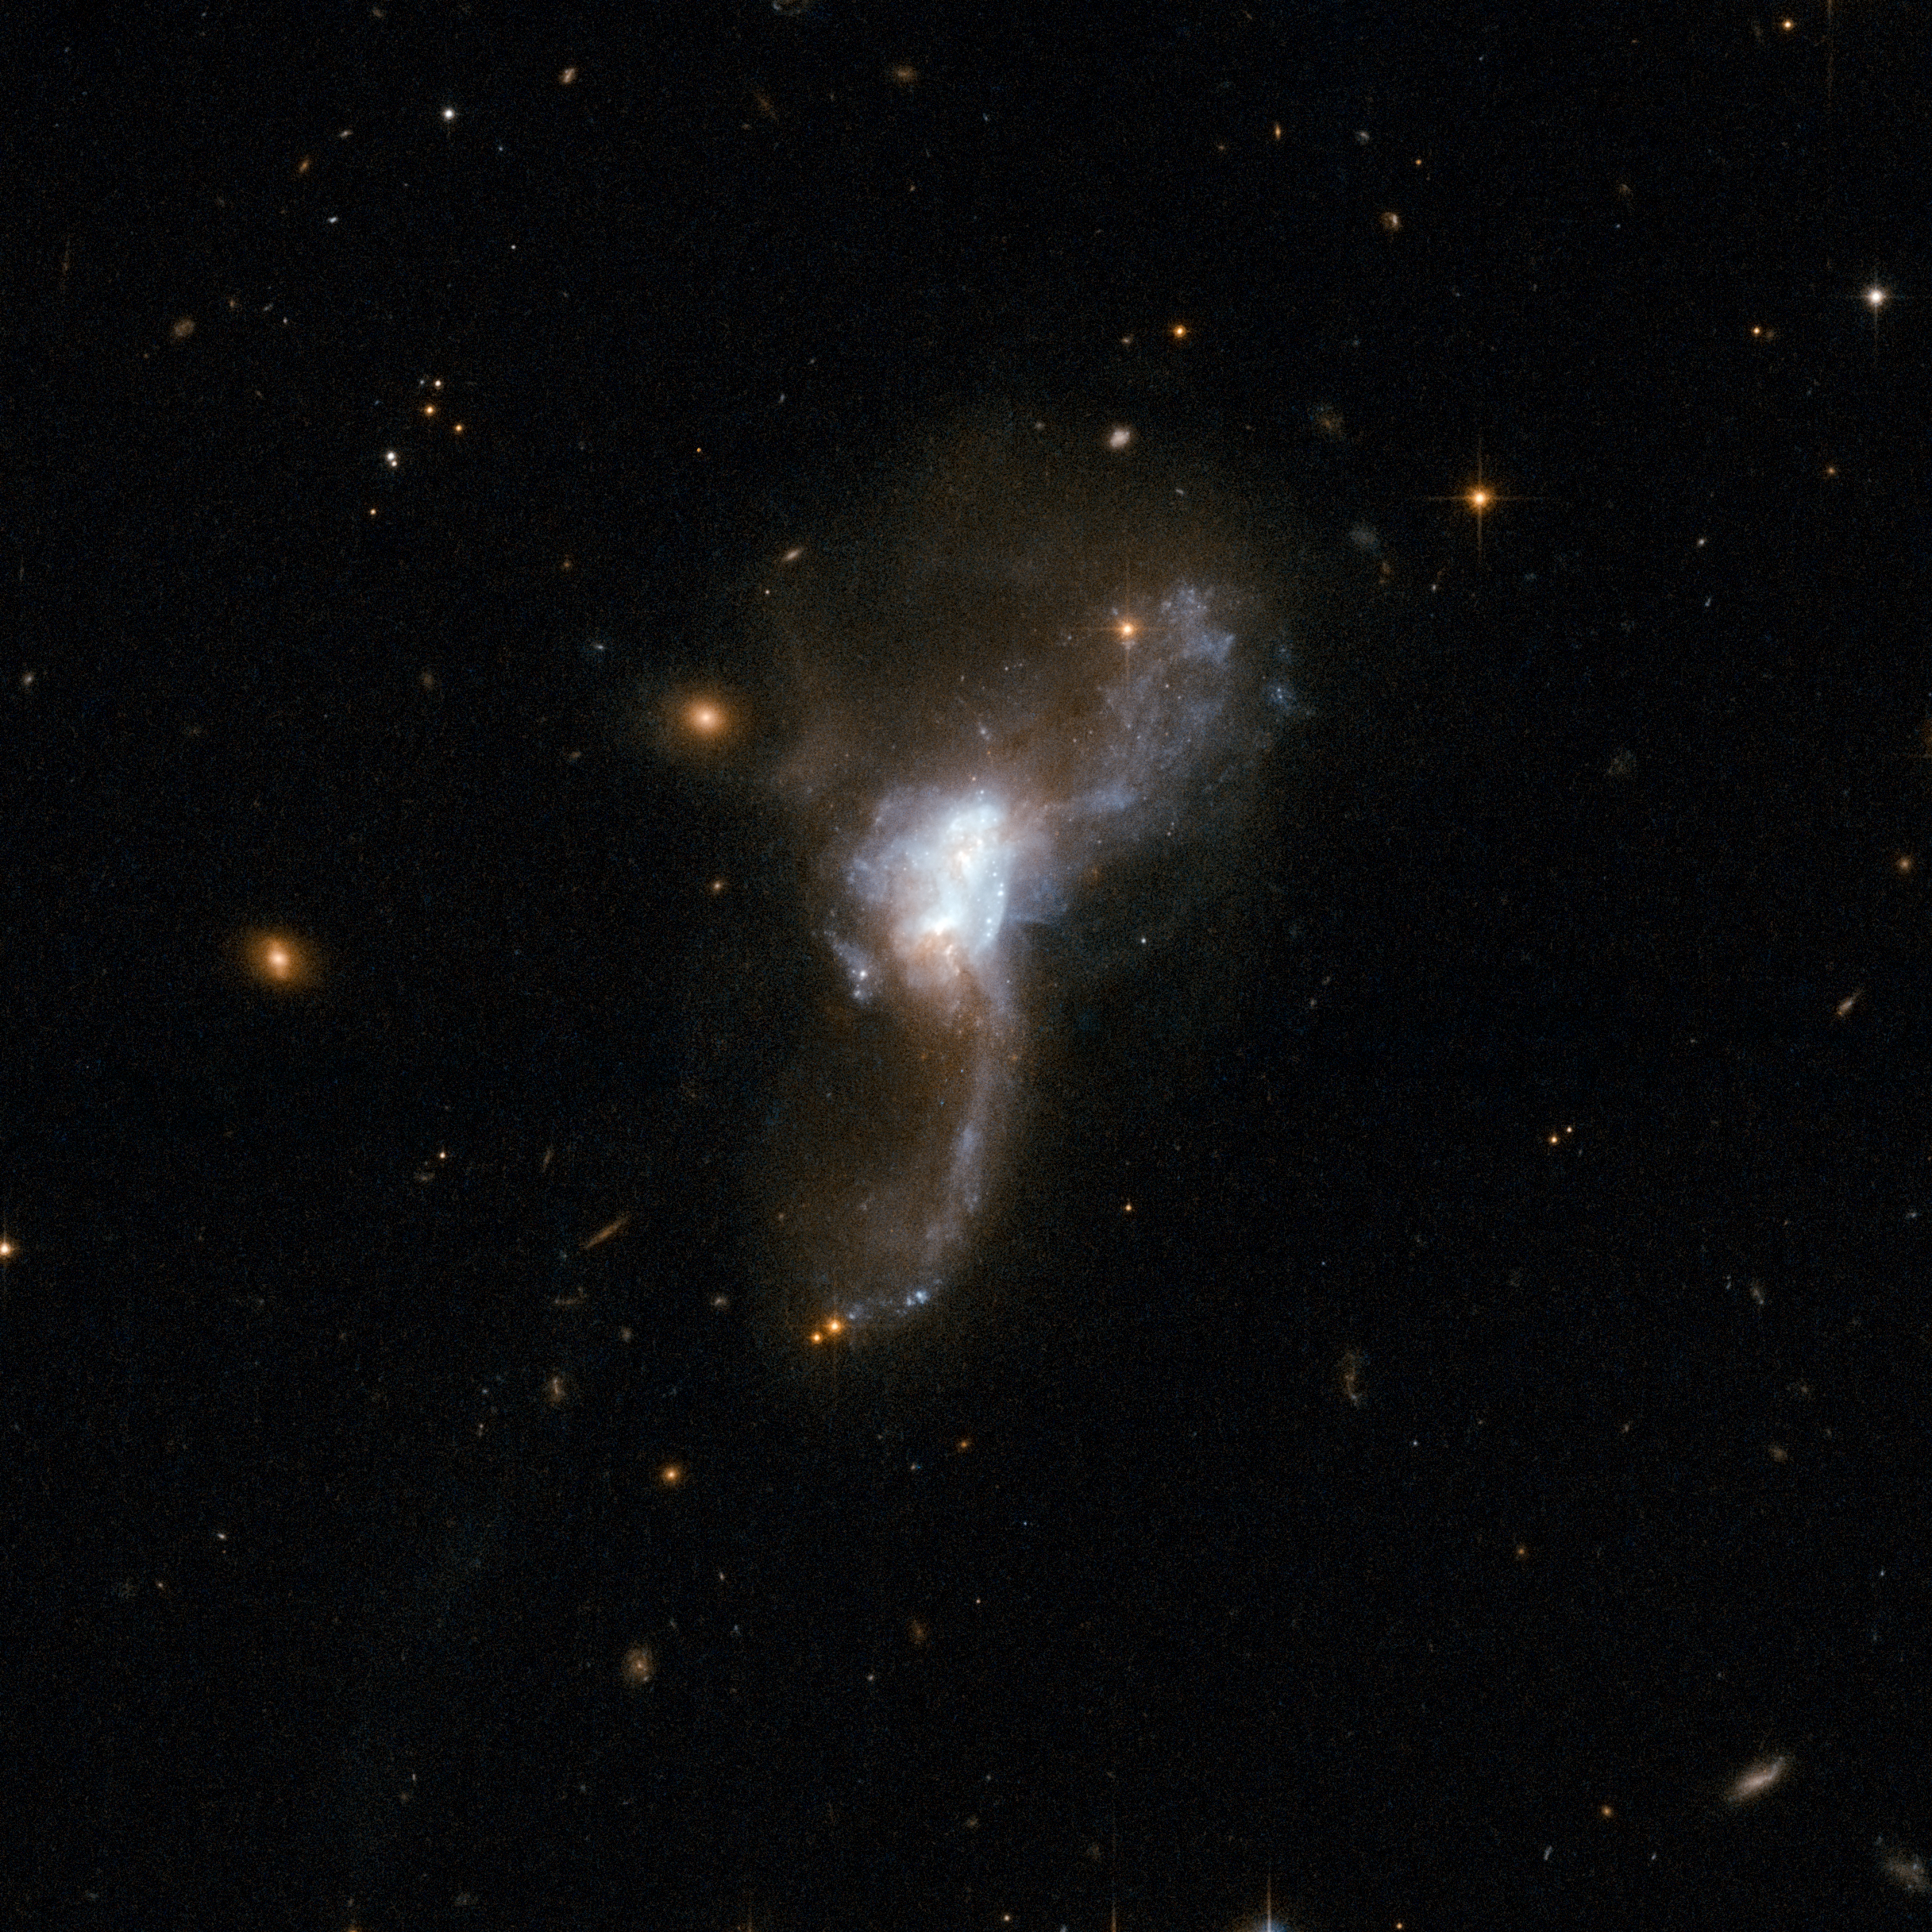

ESO 148-2

ESO 148-2 is a beautiful object that resembles an owl in flight. It consists of a pair of former disc galaxies undergoing a collision. The cores of the two individual galaxies - seen at the centre of the image - are embedded in hot dust and contain a large number of stars. Two huge "wings" sweep out from the centre and curve in opposite directions. These are tidal tails of stars and gas that have been pulled from the easily distorted discs of the galaxies. This "cosmic owl" is one of the most luminous infrared galaxies known and is located some 600 million light-years away from Earth.

This image is part of a large collection of 59 images of merging galaxies taken by the Hubble Space Telescope and released on the occasion of its 18th anniversary on 24th April 2008.

Credit: NASA, ESA, the Hubble Heritage Team (STScI/AURA)-ESA/Hubble Collaboration and A. Evans (University of Virginia, Charlottesville/NRAO/Stony Brook University)